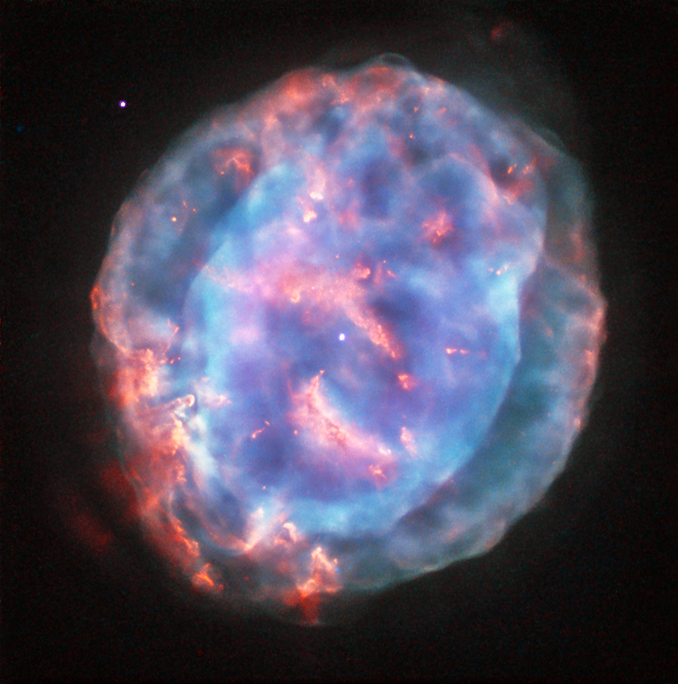

Little gem

This colourful bubble is a planetary nebula called NGC 6818, also known as the Little Gem Nebula. It is located in the constellation of Sagittarius (The Archer), roughly 6000 light-years away from us. The rich glow of the cloud is just over half a light-year across — humongous compared to its tiny central star — but still a little gem on a cosmic scale.

When stars like the Sun enter retirement, they shed their outer layers into space to create glowing clouds of gas called planetary nebulae. This ejection of mass is uneven, and planetary nebulae can have very complex shapes. NGC 6818 shows knotty filament-like structures and distinct layers of material, with a bright and enclosed central bubble surrounded by a larger, more diffuse cloud.

Scientists believe that the stellar wind from the central star propels the outflowing material, sculpting the elongated shape of NGC 6818. As this fast wind smashes through the slower-moving cloud it creates particularly bright blowouts at the bubble’s outer layers.

Hubble previously imaged this nebula back in 1997 with its Wide Field Planetary Camera 2, using a mix of filters that highlighted emission from ionised oxygen and hydrogen (opo9811h). This image, while from the same camera, uses different filters to reveal a different view of the nebula. A version of the image was submitted to the Hubble’s Hidden Treasures image processing competition by contestant Judy Schmidt.

Credit: ESA/Hubble & NASA Acknowledgement: Judy Schmidt (geckzilla.com)